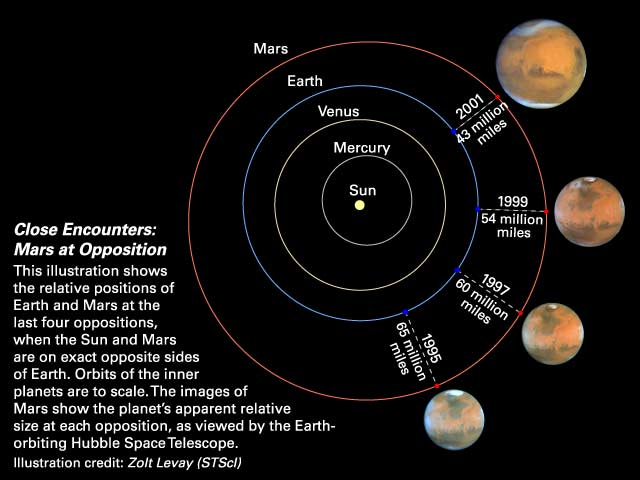

Close Encounters: Mars at Opposition

This illustration shows the relative positions of Earth and Mars at the last four oppositions, when the Sun and Mars are on exact opposite sides of Earth. Orbits of the inner planets are to scale. The images of Mars show the planet's apparant relative size at each opposition, as viewed by the Earth-orbiting Hubble Space Telescope.

Credit: Zolt Levay (STScI)